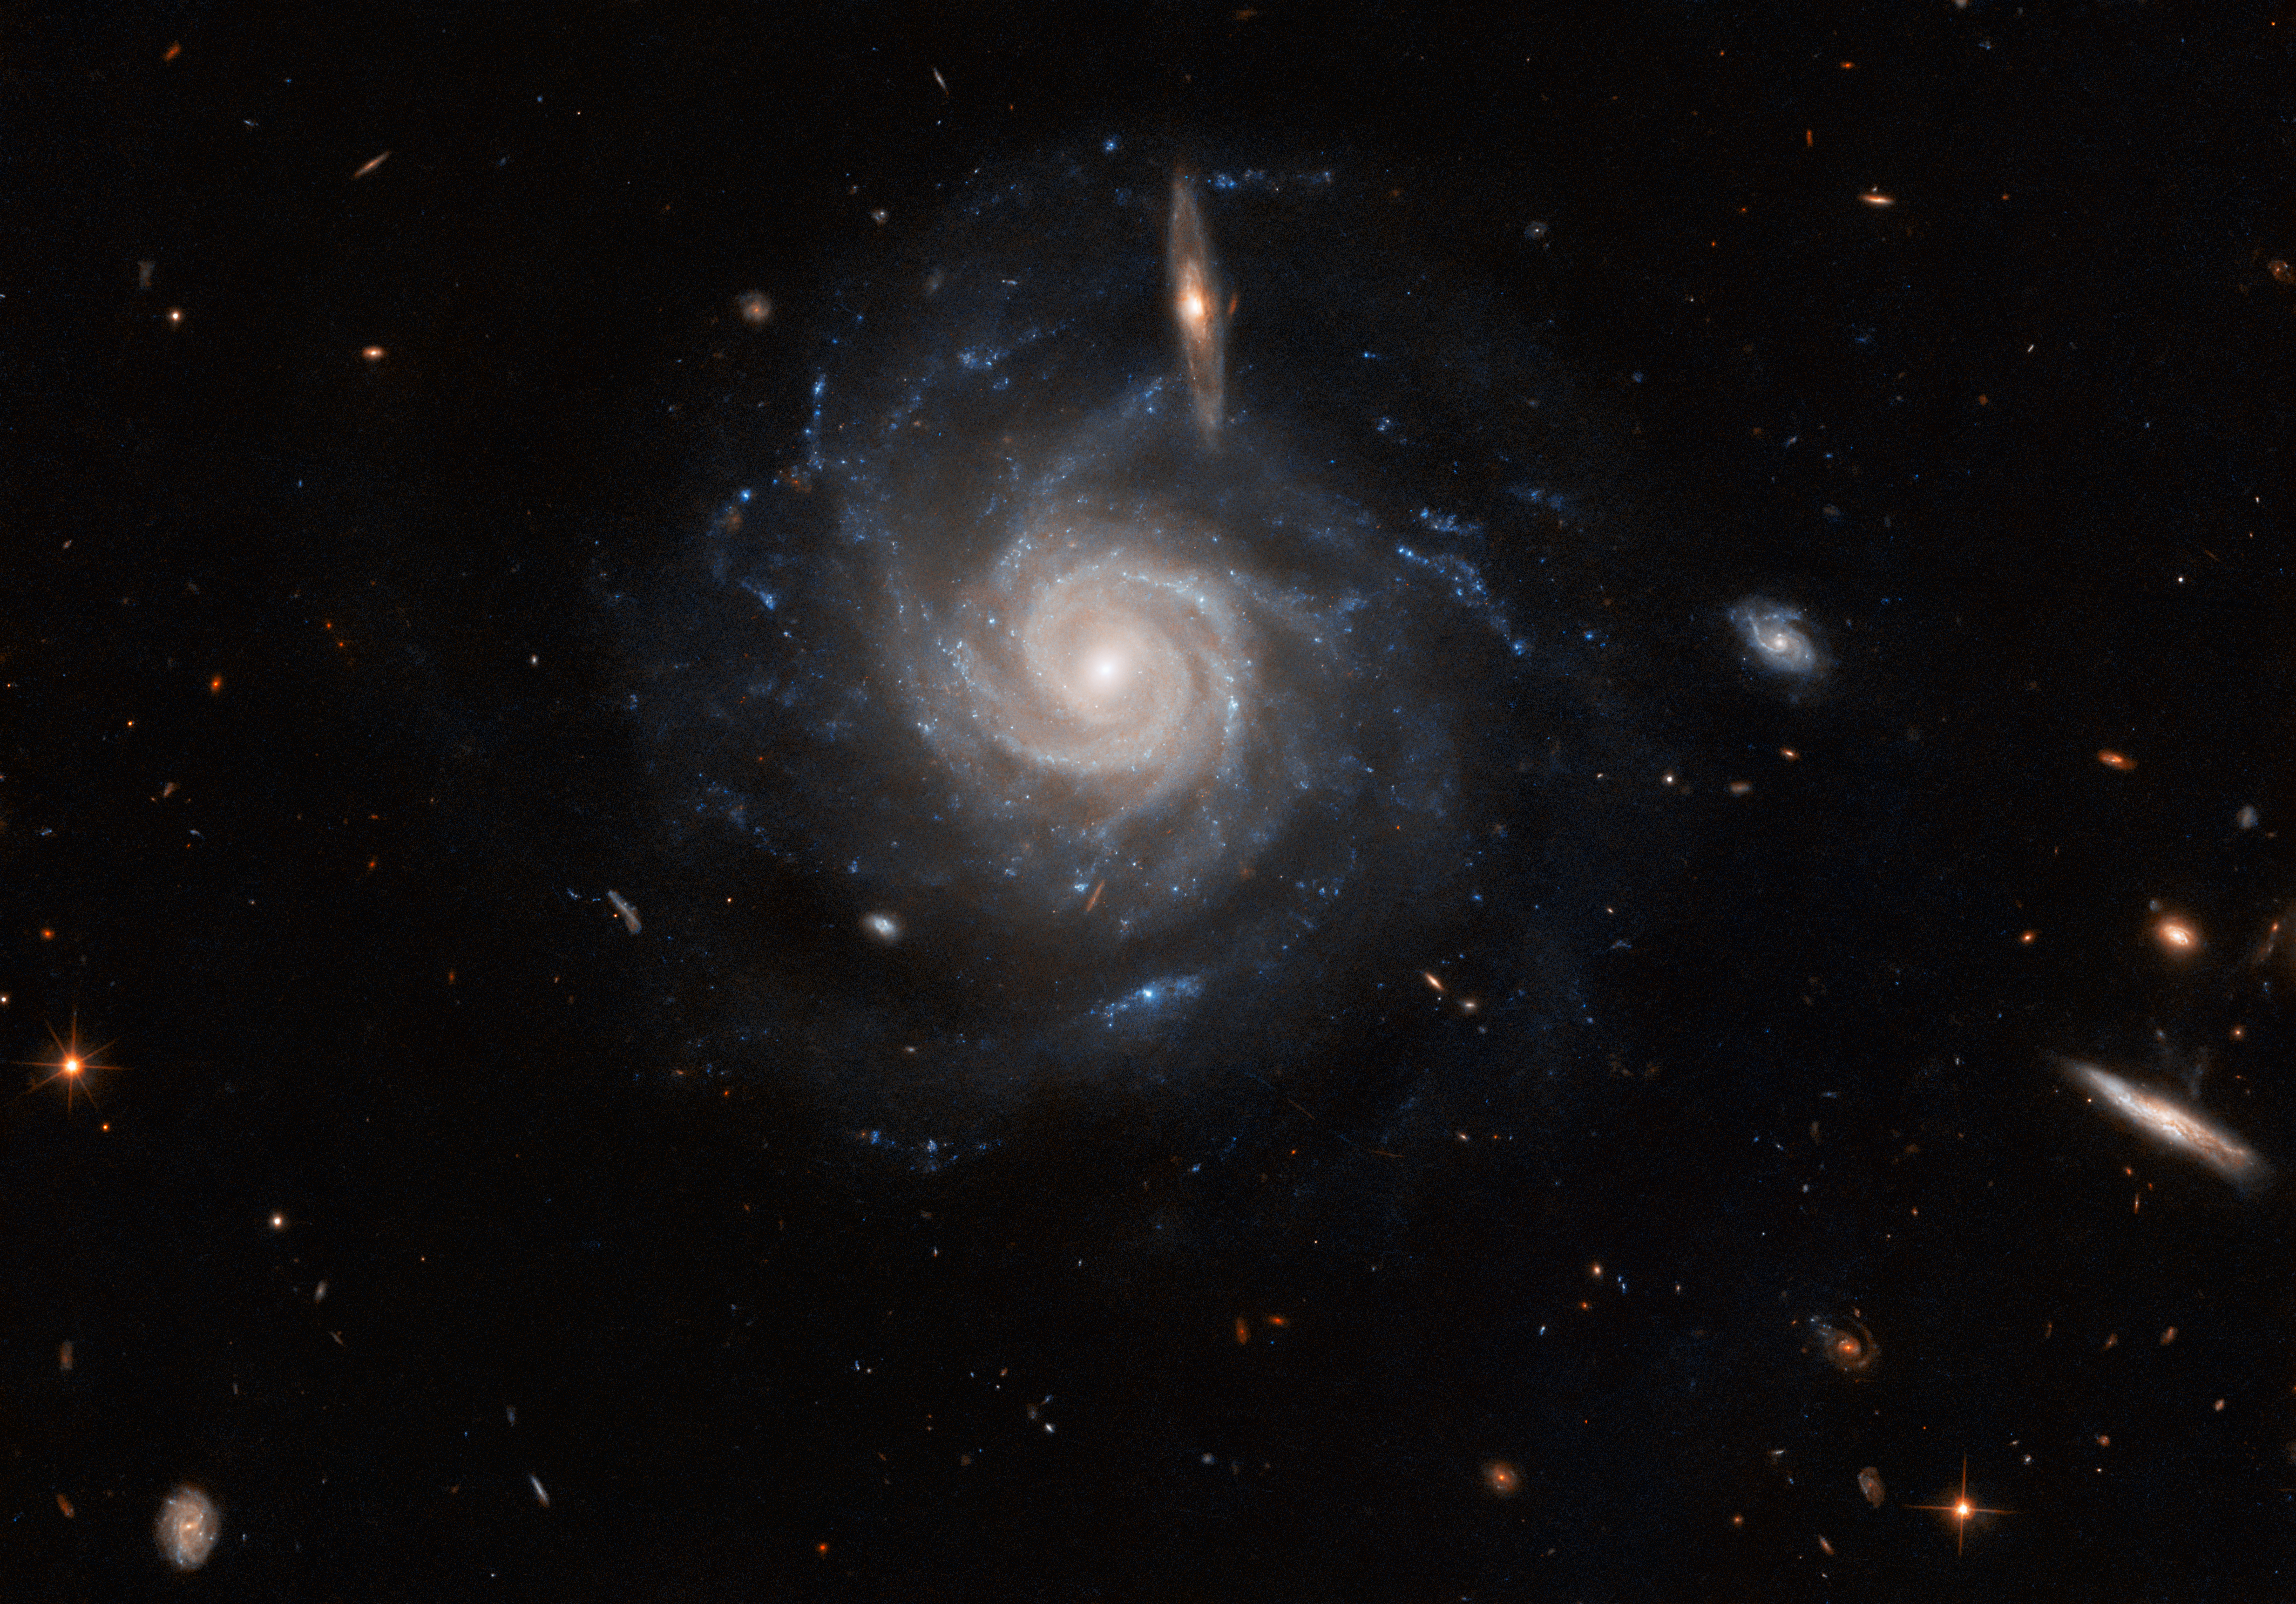

Hubble spotlights a swirling spiral

The barred spiral galaxy UGC 678 takes centre stage in this image from the NASA/ESA Hubble Space Telescope. The spectacular galaxy lies around 260 million light-years from Earth in the constellation Pisces and is almost face on, allowing its lazily winding spiral arms to stretch across this image. In the foreground, a smaller edge-on galaxy seems to bisect the upper portion of UGC 678.

Just like humans, stars have a natural lifecycle; they are born, grow up, and eventually grow old and die. Studying this stellar life cycle — usually referred to as stellar evolution — is an important topic for astronomers. The ends of star lives can be marked by truly spectacular events, including titanic supernova explosions, the creation of unimaginably dense neutron stars, and even the birth of black holes. UGC 678 was recently found to be host to one of these events; in 2020 a robotic telescope scanning the night sky in search of dangerous asteroids discovered evidence of an enormous supernova explosion in the galaxy.

Two separate Hubble observations turned to UGC 678 to scour the galaxy in search of the aftermath of its supernova explosion. One team of astronomers used Hubble’s Advanced Camera for Surveys, and the other the Wide Field Camera 3, but both aimed to explore UGC 678 in the hope of unearthing clues to the identity of the star that produced the 2020 supernova.

Credit: ESA/Hubble & NASA, C. Kilpatrick, R. J. Foley